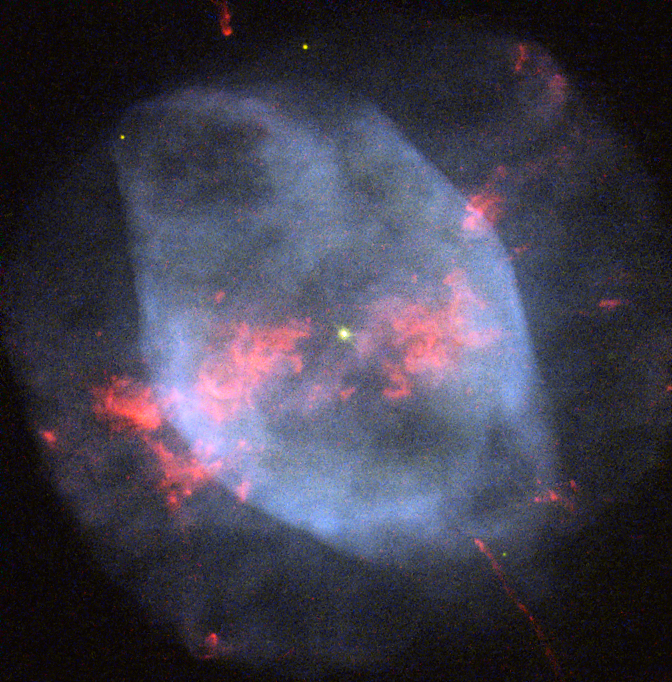

Smoky shells

Located in a relatively vacant region of space about 4200 light-years away and difficult to see using an amateur telescope, the lonesome planetary nebula NGC 7354 is often overlooked. However, thanks to this image captured by the NASA/ESA Hubble Space Telescope we are able to see this brilliant ball of smoky light in spectacular detail.

Just as shooting stars are not actually stars and lava lamps do not actually contain lava, planetary nebulae have nothing to do with planets. The name was coined by Sir William Herschel because when he first viewed a planetary nebula through a telescope, he could only identify a hazy smoky sphere, similar to gaseous planets such as Uranus. The name has stuck even though modern telescopes make it obvious that these objects are not planets at all, but the glowing gassy outer layers thrown off by a hot dying star.

It is believed that winds from the central star play an important role in determining the shape and morphology of planetary nebulae. The structure of NGC 7354 is relatively easy to distinguish. It consists of a circular outer shell, an elliptical inner shell, a collection of bright knots roughly concentrated in the middle and two symmetrical jets shooting out from either side. Research suggests that these features could be due to a companion central star, however the presence of a second star in NGC 7354 is yet to be confirmed.

NGC 7354 resides in Cepheus, a constellation named after the mythical King Cepheus of Aethiopia and is about half a light-year in diameter.

A version of this image was entered into the Hubble’s Hidden Treasures image processing competition by contestant Bruno Conti.

Credit: ESA/Hubble & NASA